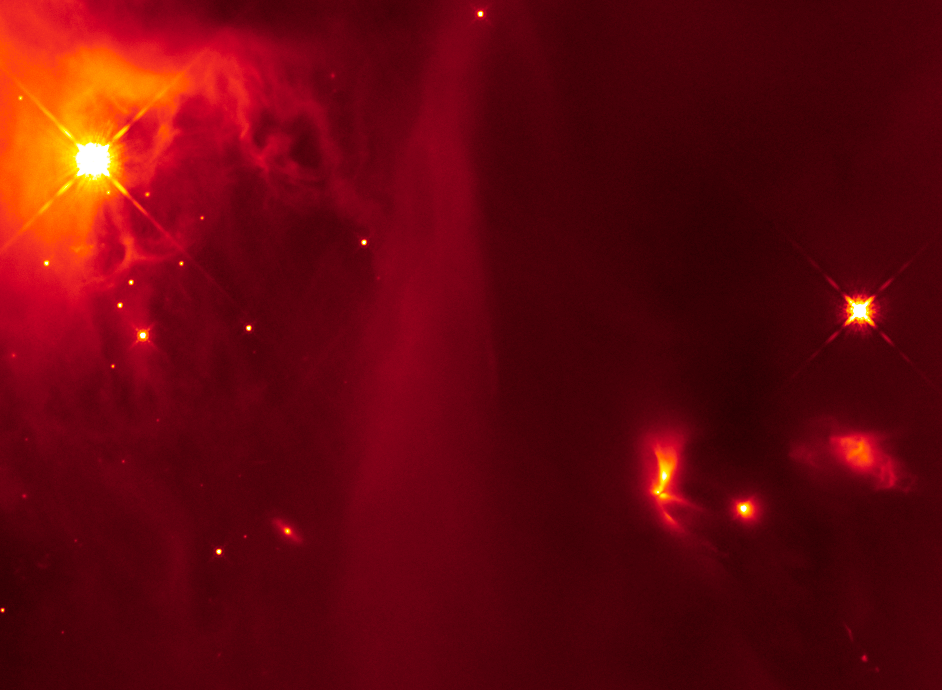

Hubble image of LRLL 54361 and its surroundings

This infrared image from the NASA/ESA Hubble Space Telescope shows an image of protostellar object LRLL 54361 and its rich cosmic neighbourhood, a region called IC 348.

The protostar, which is the bright object with fan-like beams of light coming from it, located towards the right of the image, is letting off flashes of light every 25.3 days.

Credit: NASA, ESA, and J. Muzerolle (STScI)